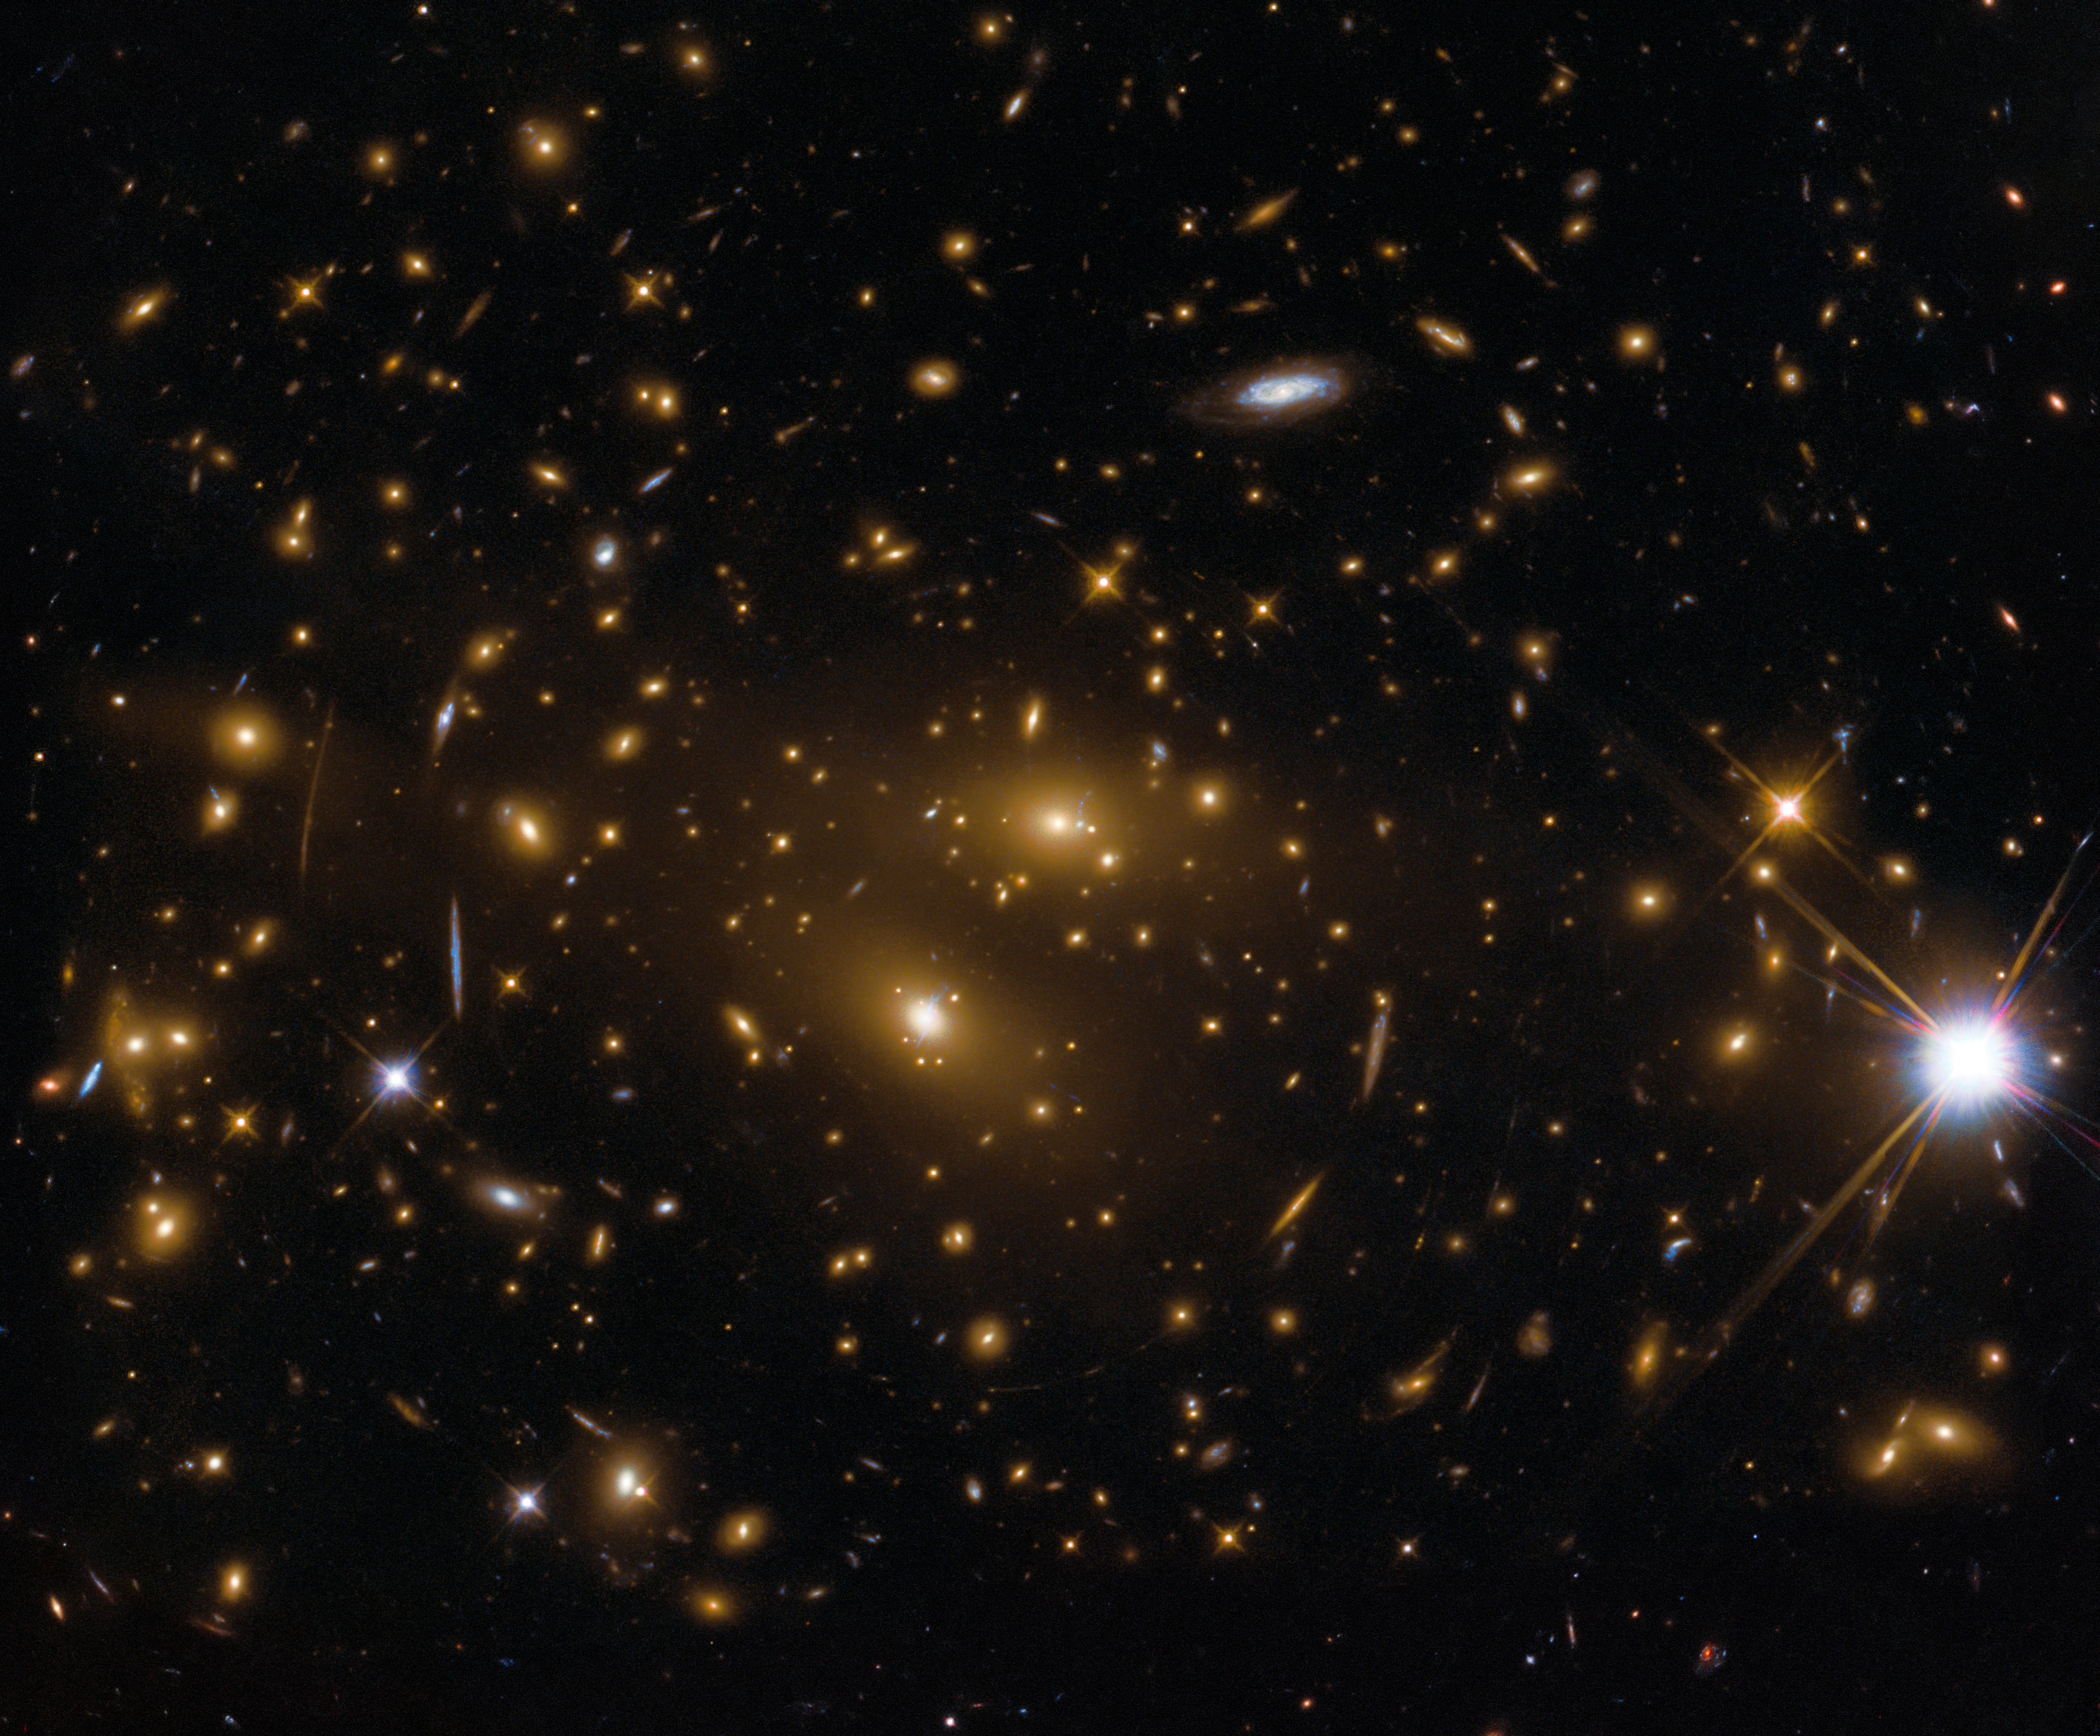

A CLASH of galaxies

This cluster of galaxies, RX J1347.5–1145, was observed by the NASA/ESA Hubble Space Telescope as part of the Cluster Lensing And Supernova survey with Hubble (CLASH). The cluster is one of most massive known galaxy clusters in the Universe.

Credit: ESA/Hubble, NASA